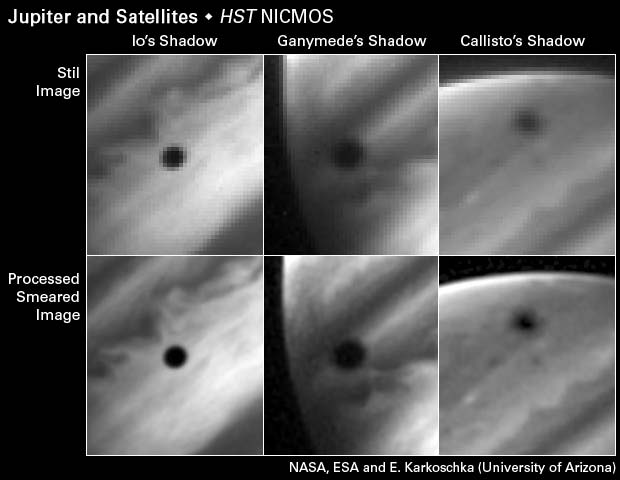

Jupiter image processing technique

These six images demonstrate a new imaging technique, which allowed astronomers to make a sharper image of the triple eclipse on Jupiter. The Hubble Space Telescope took rapid-fire snapshots of Jupiter as it swung through the observatory's field of view. The top row of images shows three of those snapshots. Astronomers then combined the images, accounting for the planet's rotation between exposures, to obtain the sharper photo. The bottom row shows the sharper images. Astronomers added 20 exposures together to make each image.

Credit: NASA, ESA, and E. Karkoschka (University of Arizona)